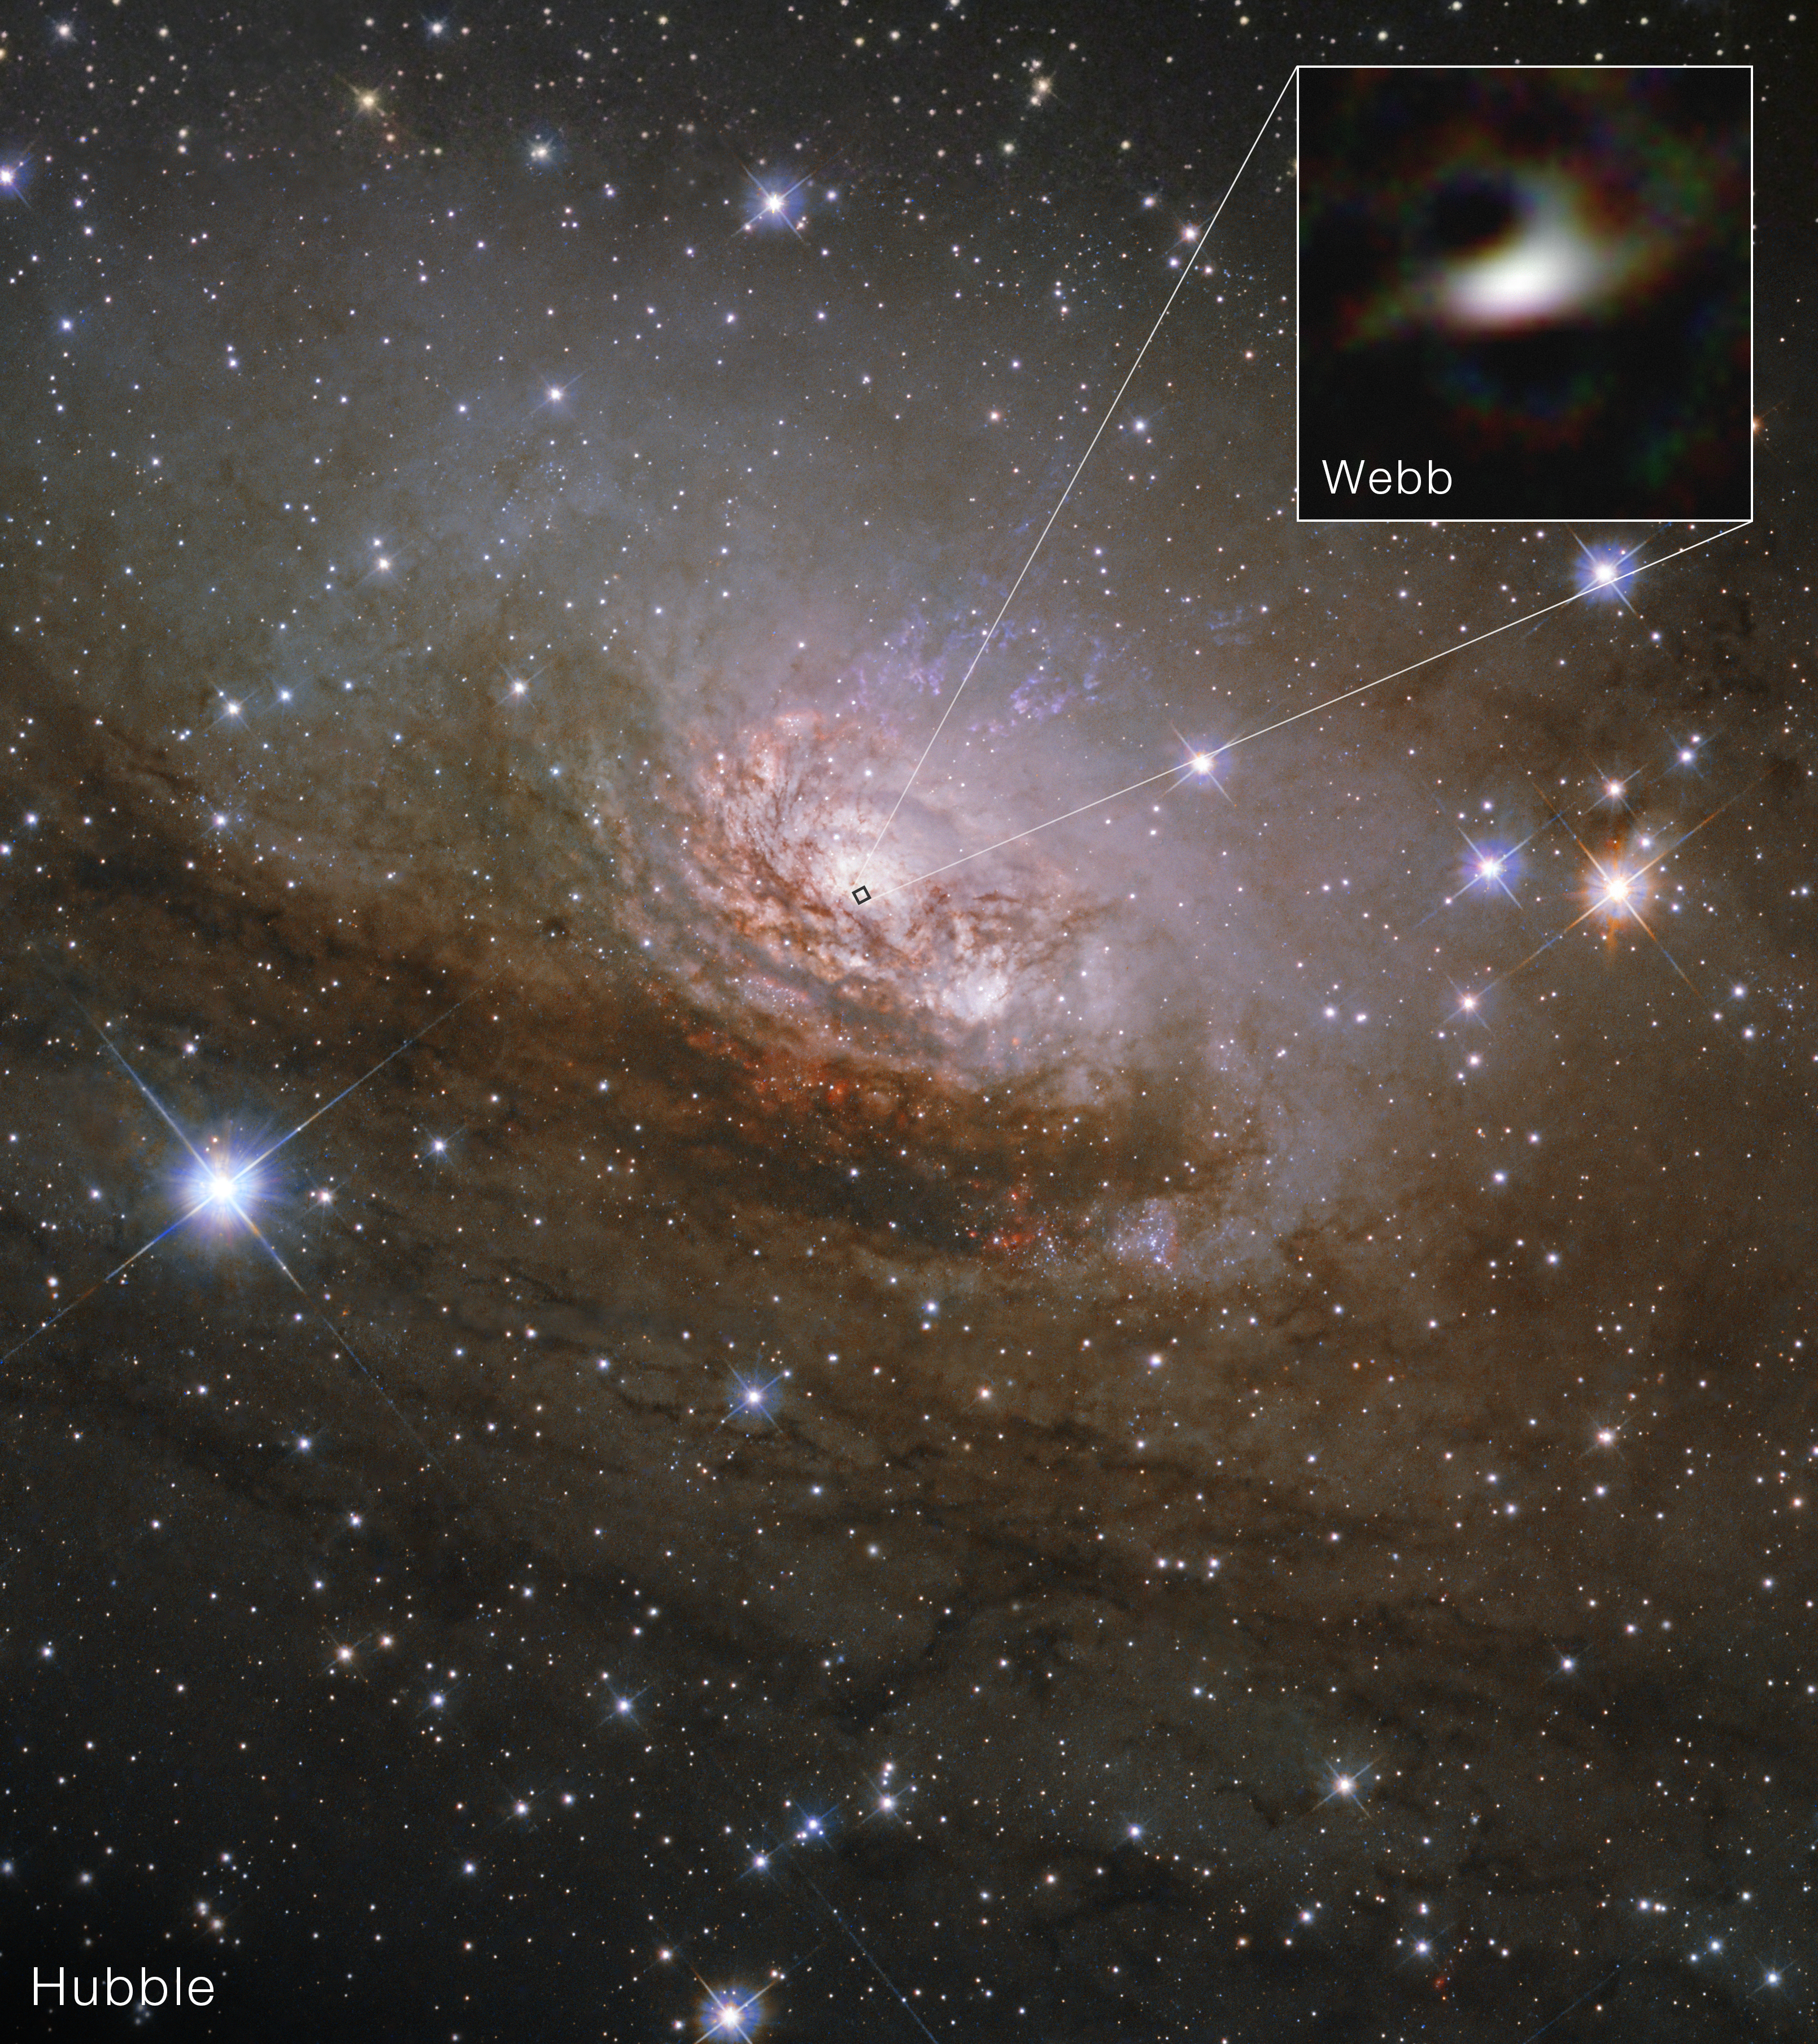

Circinus Galaxy (Hubble and Webb)

The Circinus Galaxy, a galaxy about 13 million light-years away, contains an active supermassive black hole that continues to influence its evolution. The largest source of infrared light from the region closest to the black hole itself was thought to be outflows, or streams of superheated matter that fire outward.

Now, new observations from the NASA/ESA/CSA James Webb Space Telescope provide evidence that reverses this thinking, suggesting that most of the hot, dusty material is actually feeding the central black hole. The technique used to gather this data also has the potential to analyze the outflow and accretion components for other nearby black holes.

This image from the NASA/ESA Hubble Space Telescope shows a full view of the Circinus galaxy, a nearby spiral galaxy about 13 million light-years away. The inset highlights a close-up from Webb of the galaxy’s core, where infrared observations pierce through dust to reveal hot material feeding its central supermassive black hole. Webb’s image, made using the Aperture Masking Interferometer (AMI) tool on its NIRISS (Near-Infrared Imager and Slitless Spectrograph) instrument, isolates hot dust in the immediate surroundings of the supermassive black hole, revealing that most of the infrared emission comes from a compact, dusty structure feeding the black hole rather than from outflowing material. In the Webb image, the inner face of the torus glows in infrared light, while the darker areas represent where the outer ring is blocking light.

The research, which includes the sharpest image of a black hole’s surroundings ever taken by Webb, was published today in Nature. Learn more about this result here.

Credit: NASA, ESA, CSA, E. Lopez-Rodriguez (University of South Carolina), D. Thatte (STScI), Image Processing: A. Pagan (STScI). Acknowledgment: NSF's NOIRLab, CTIO